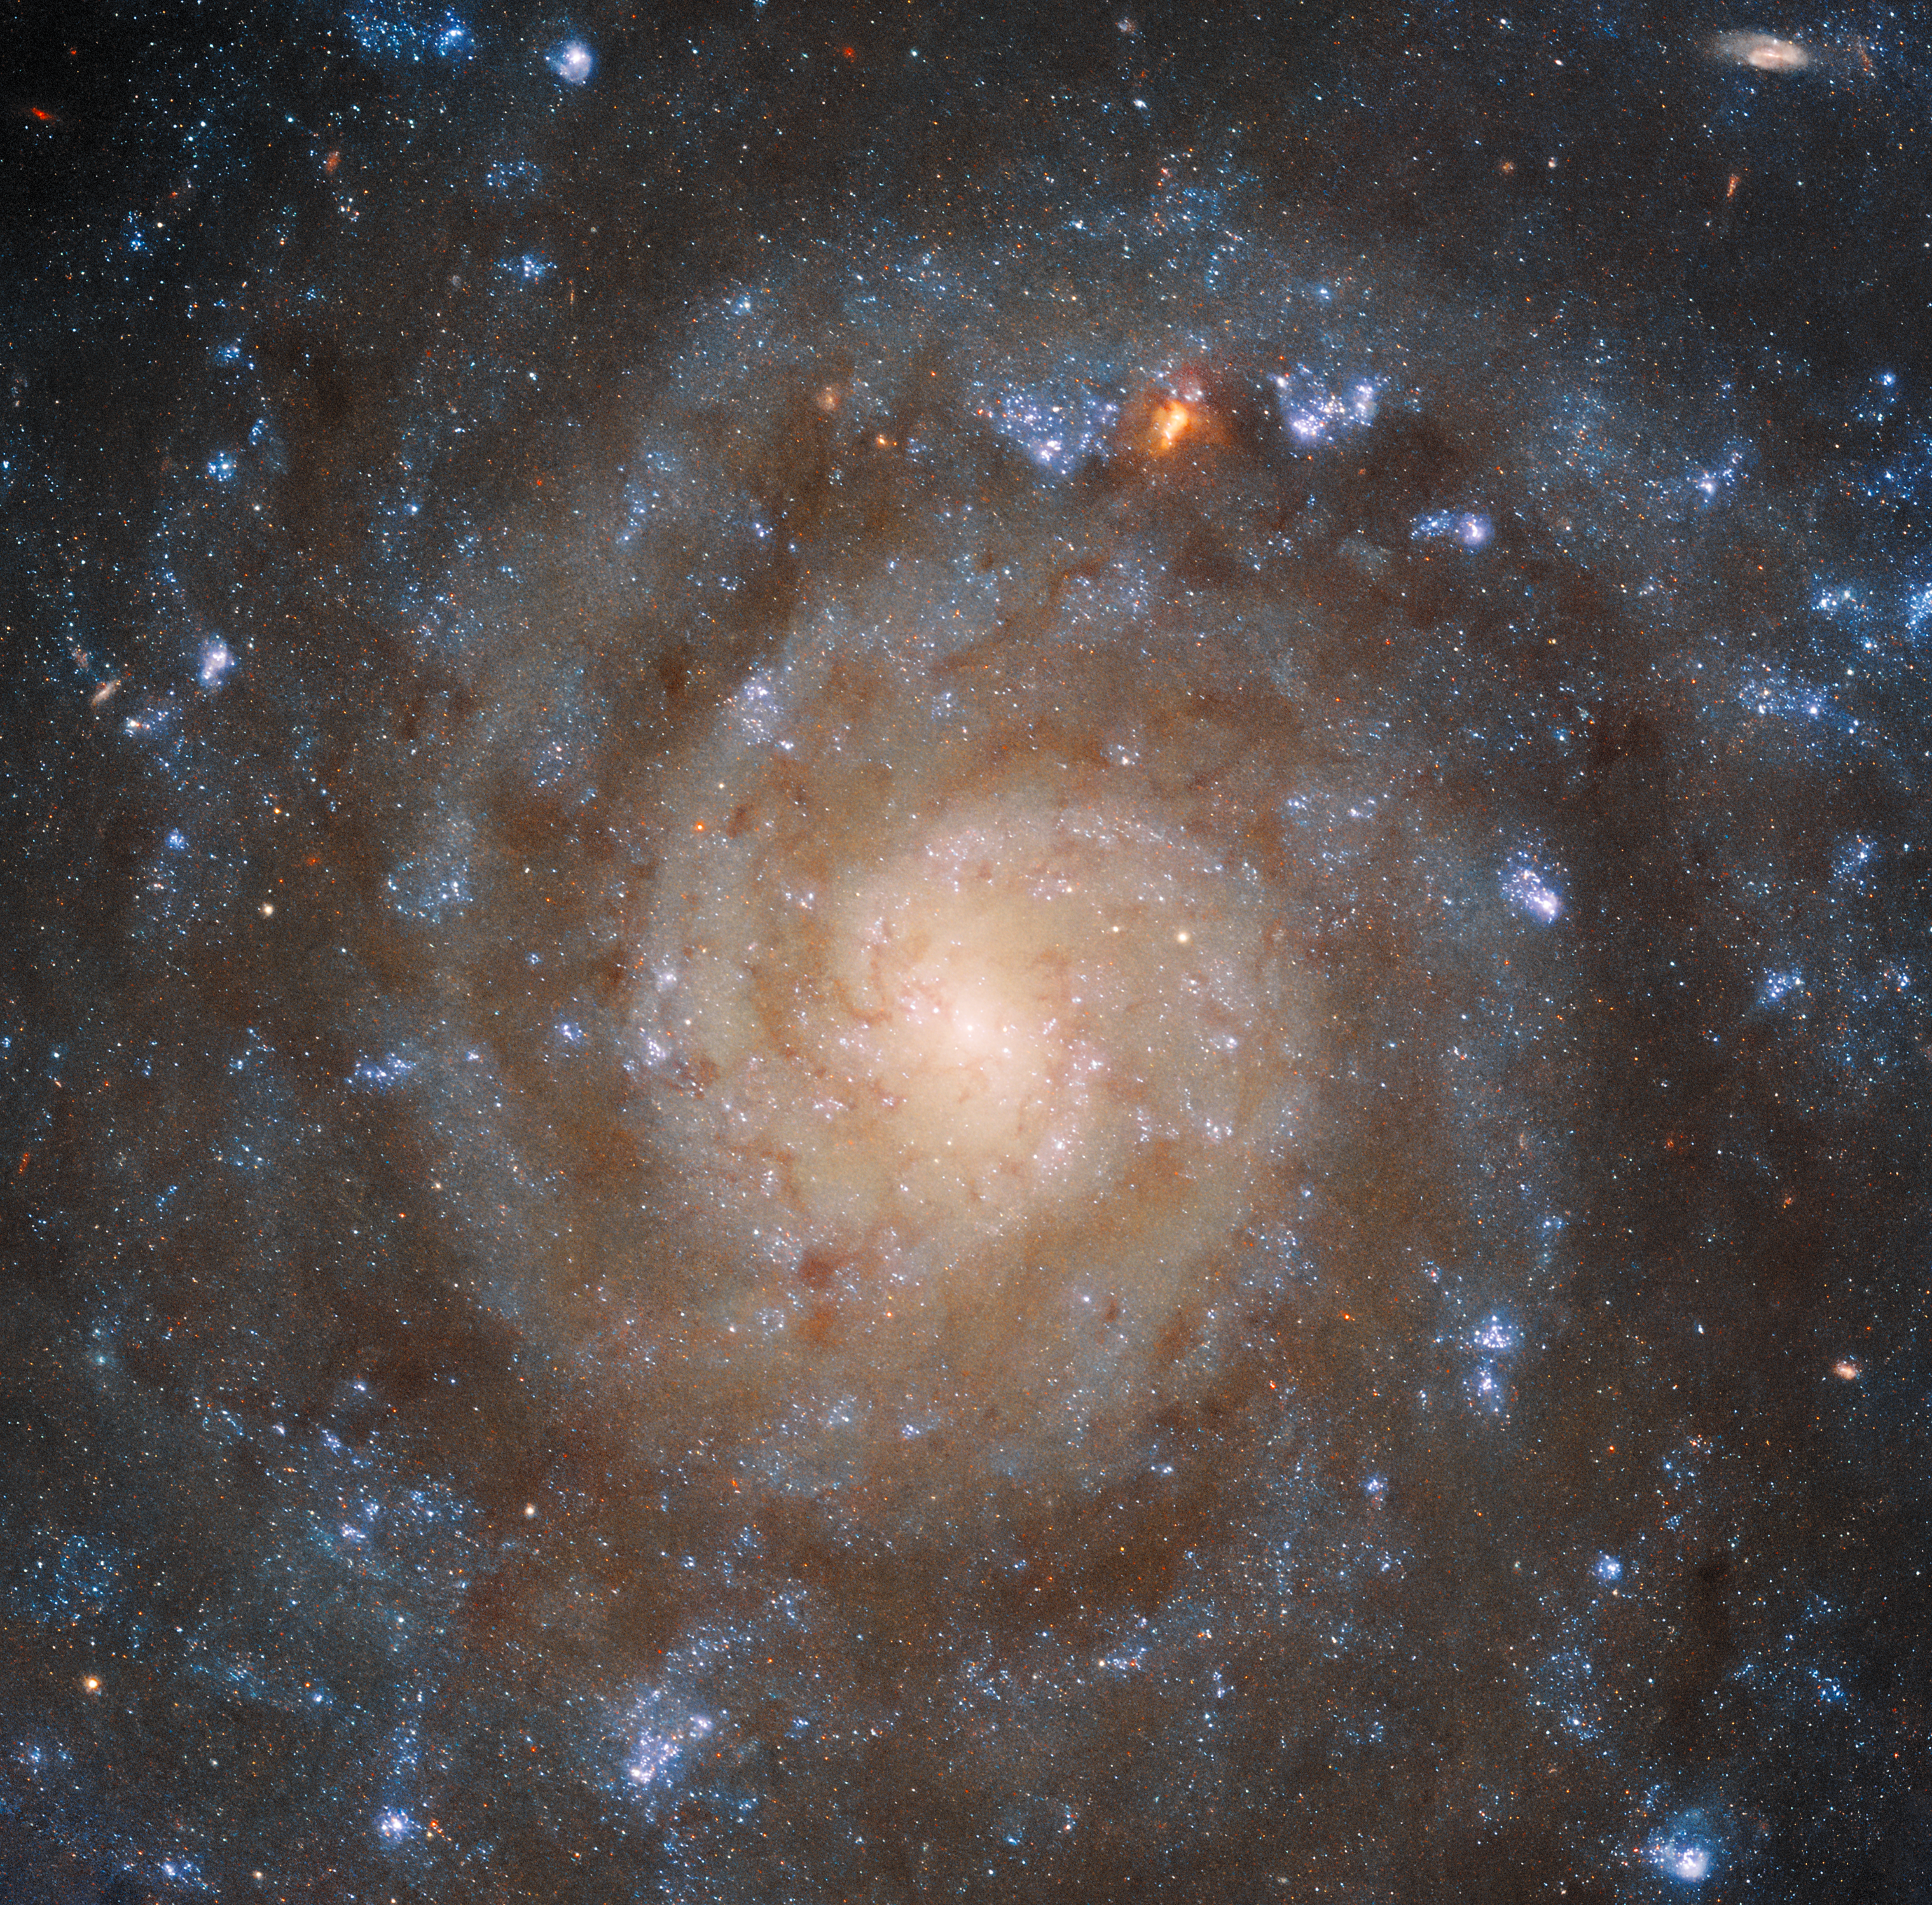

Hubble Sees the Big Picture of a Complex Galaxy

The winding spiral structure of the galaxy IC 5332 is portrayed in amazing detail by this image from the NASA/ESA Hubble Space Telescope. The clarity of Hubble’s Wide Field Camera 3 (WFC3) separates the arms of the galaxy from dark patches of dust in between, which block out the ultraviolet and visible light Hubble is sensitive to. Younger and older stars can be differentiated by their colours, showing how they are distributed throughout the galaxy. Meanwhile, Webb’s MIRI image provides a very different view, instead highlighting the patterns of gas spread throughout the galaxy.

Credit: ESA/Webb, NASA & CSA, J. Lee and the PHANGS-JWST and PHANGS-HST Teams